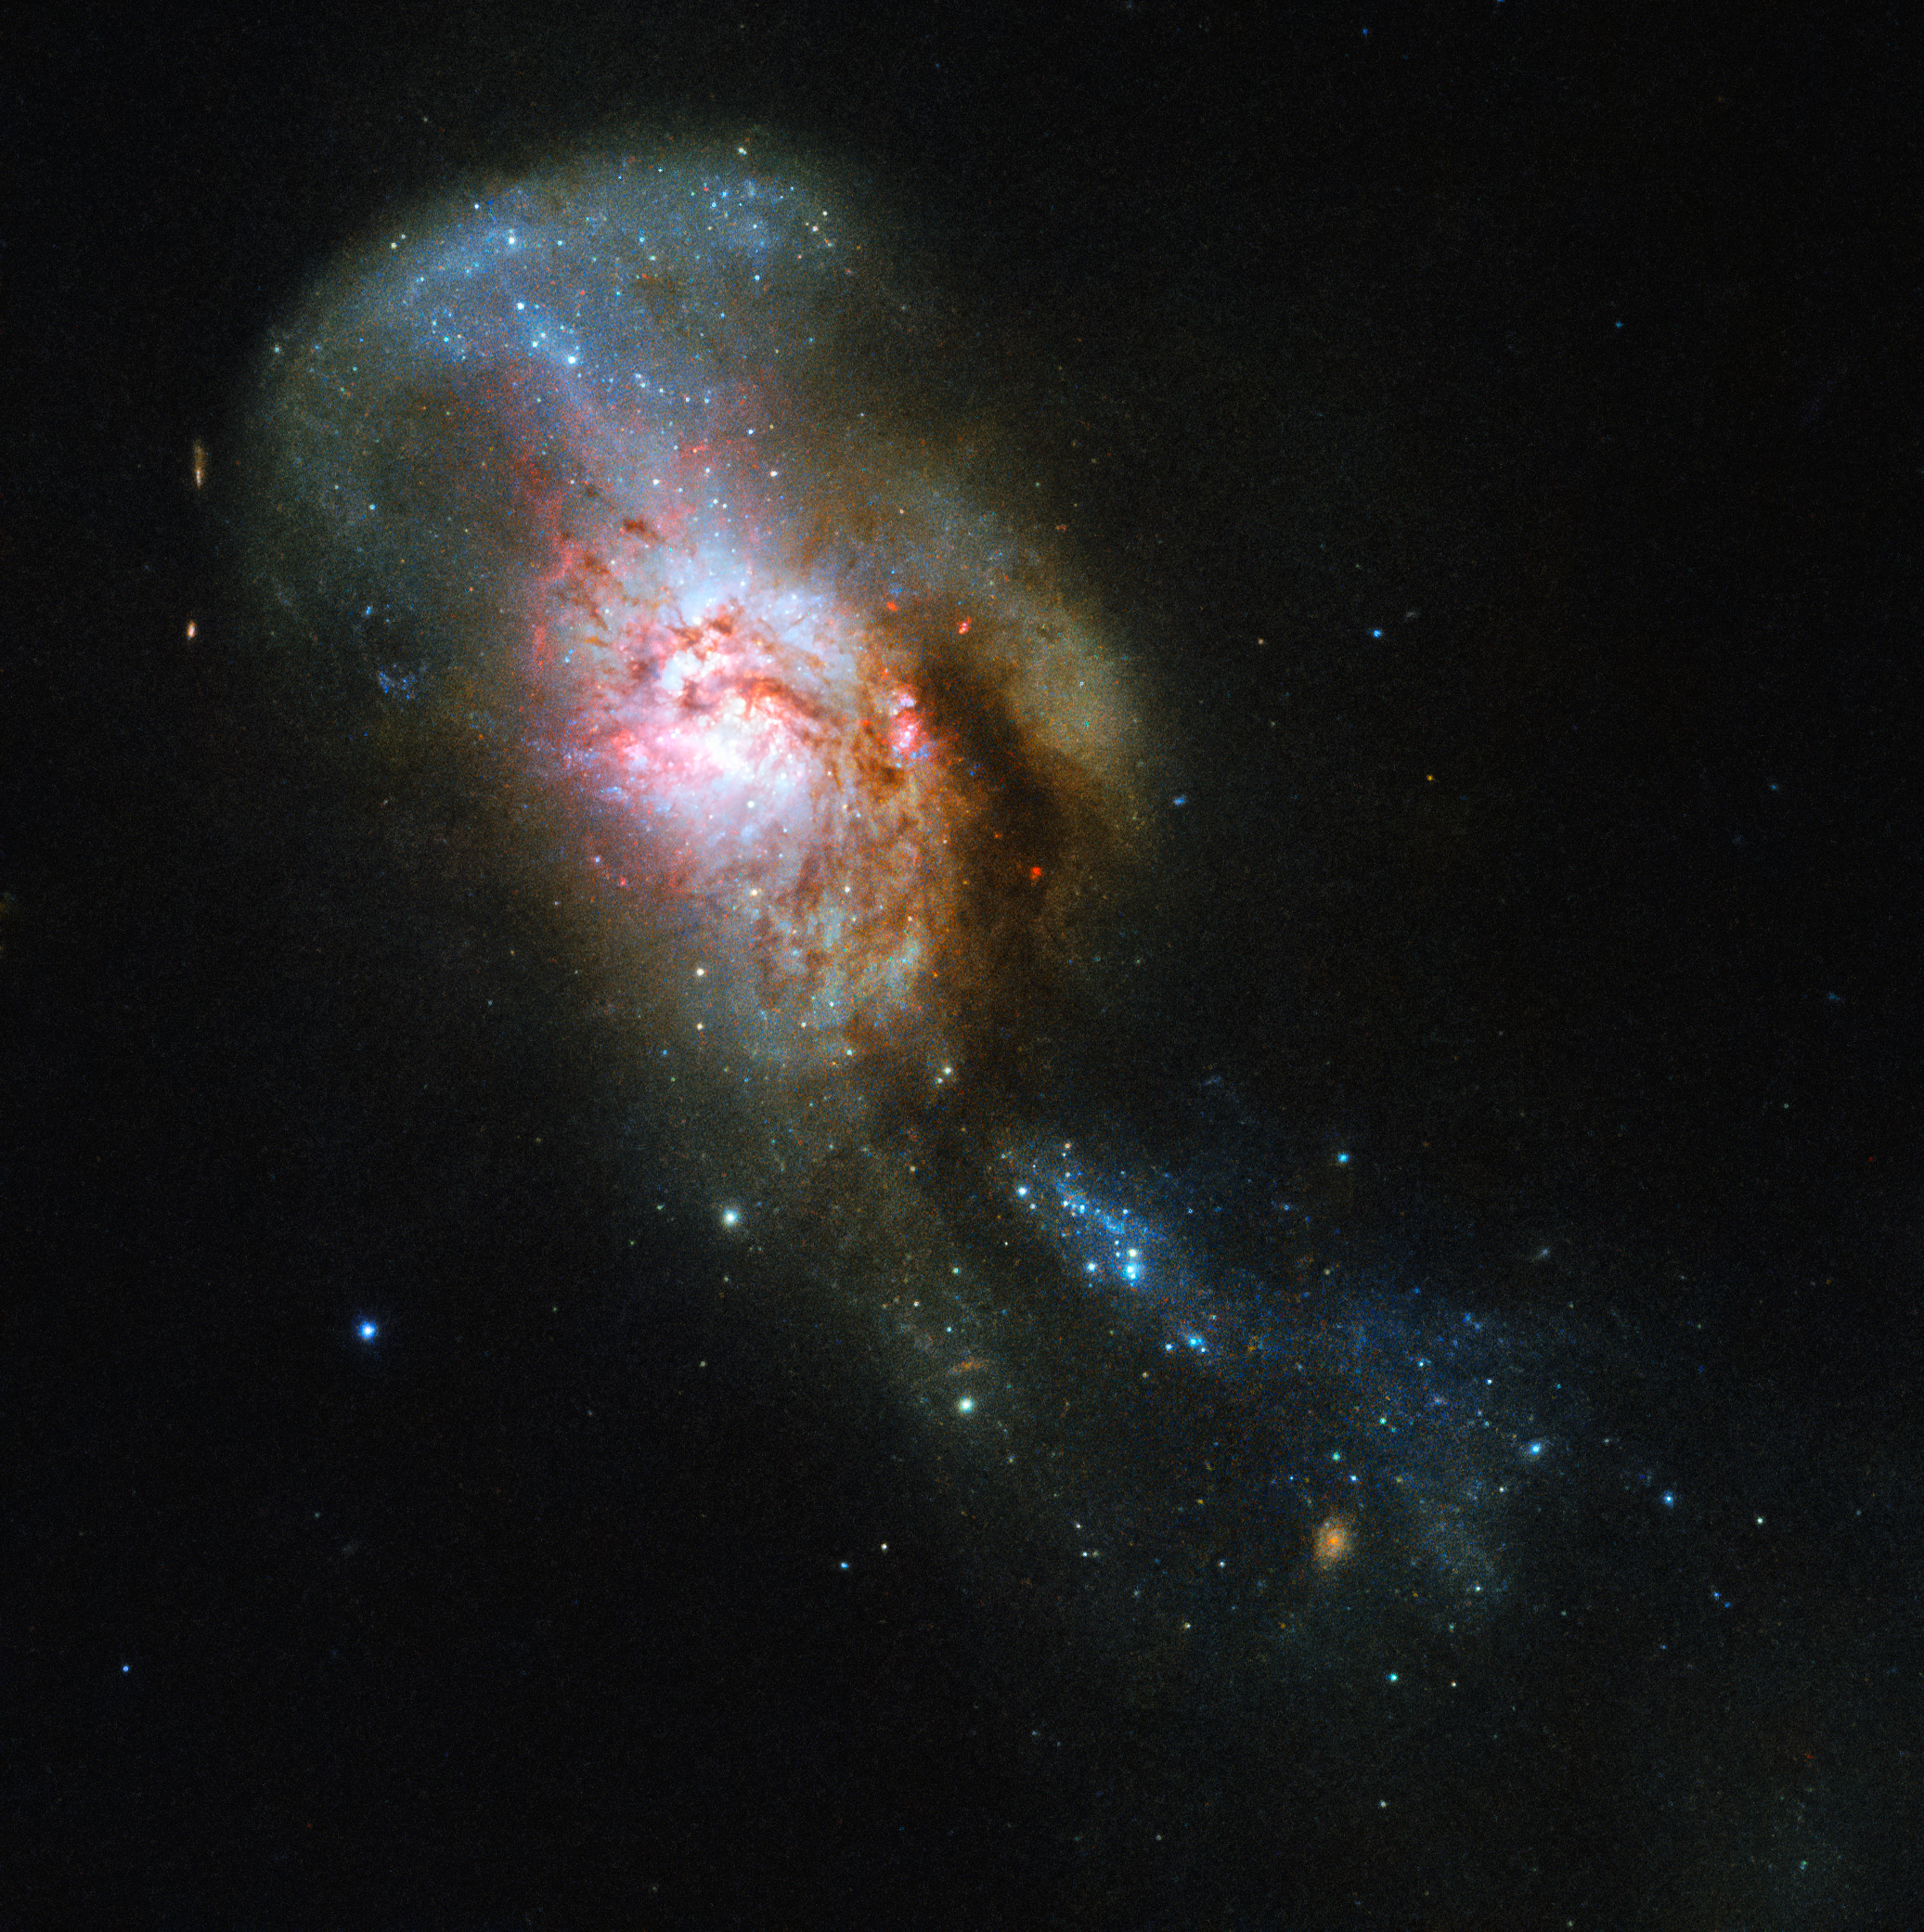

Snakes and Stones

The galaxy pictured in this Hubble Picture of the Week has an especially evocative name: the Medusa merger.

Often referred to by its somewhat drier New General Catalogue designation of NGC 4194, this was not always one entity, but two. An early galaxy consumed a smaller gas-rich system, throwing out streams of stars and dust out into space. These streams, seen rising from the top of the merger galaxy, resembles the writhing snakes that Medusa, a monster in ancient Greek mythology, famously had on her head in place of hair, lending the object its intriguing name.

The legend of Medusa also held that anyone who saw her face would transform into stone. In this case, you can feast your eyes without fear on the centre of the merging galaxies, a region known as Medusa's eye. All the cool gas pooling here has triggered a burst of star formation, causing it to stand out brightly against the dark cosmic backdrop.

The Medusa merger is located about 130 million light-years away in the constellation of Ursa Major (The Great Bear).

Credit: ESA/Hubble & NASA, A. Adamo